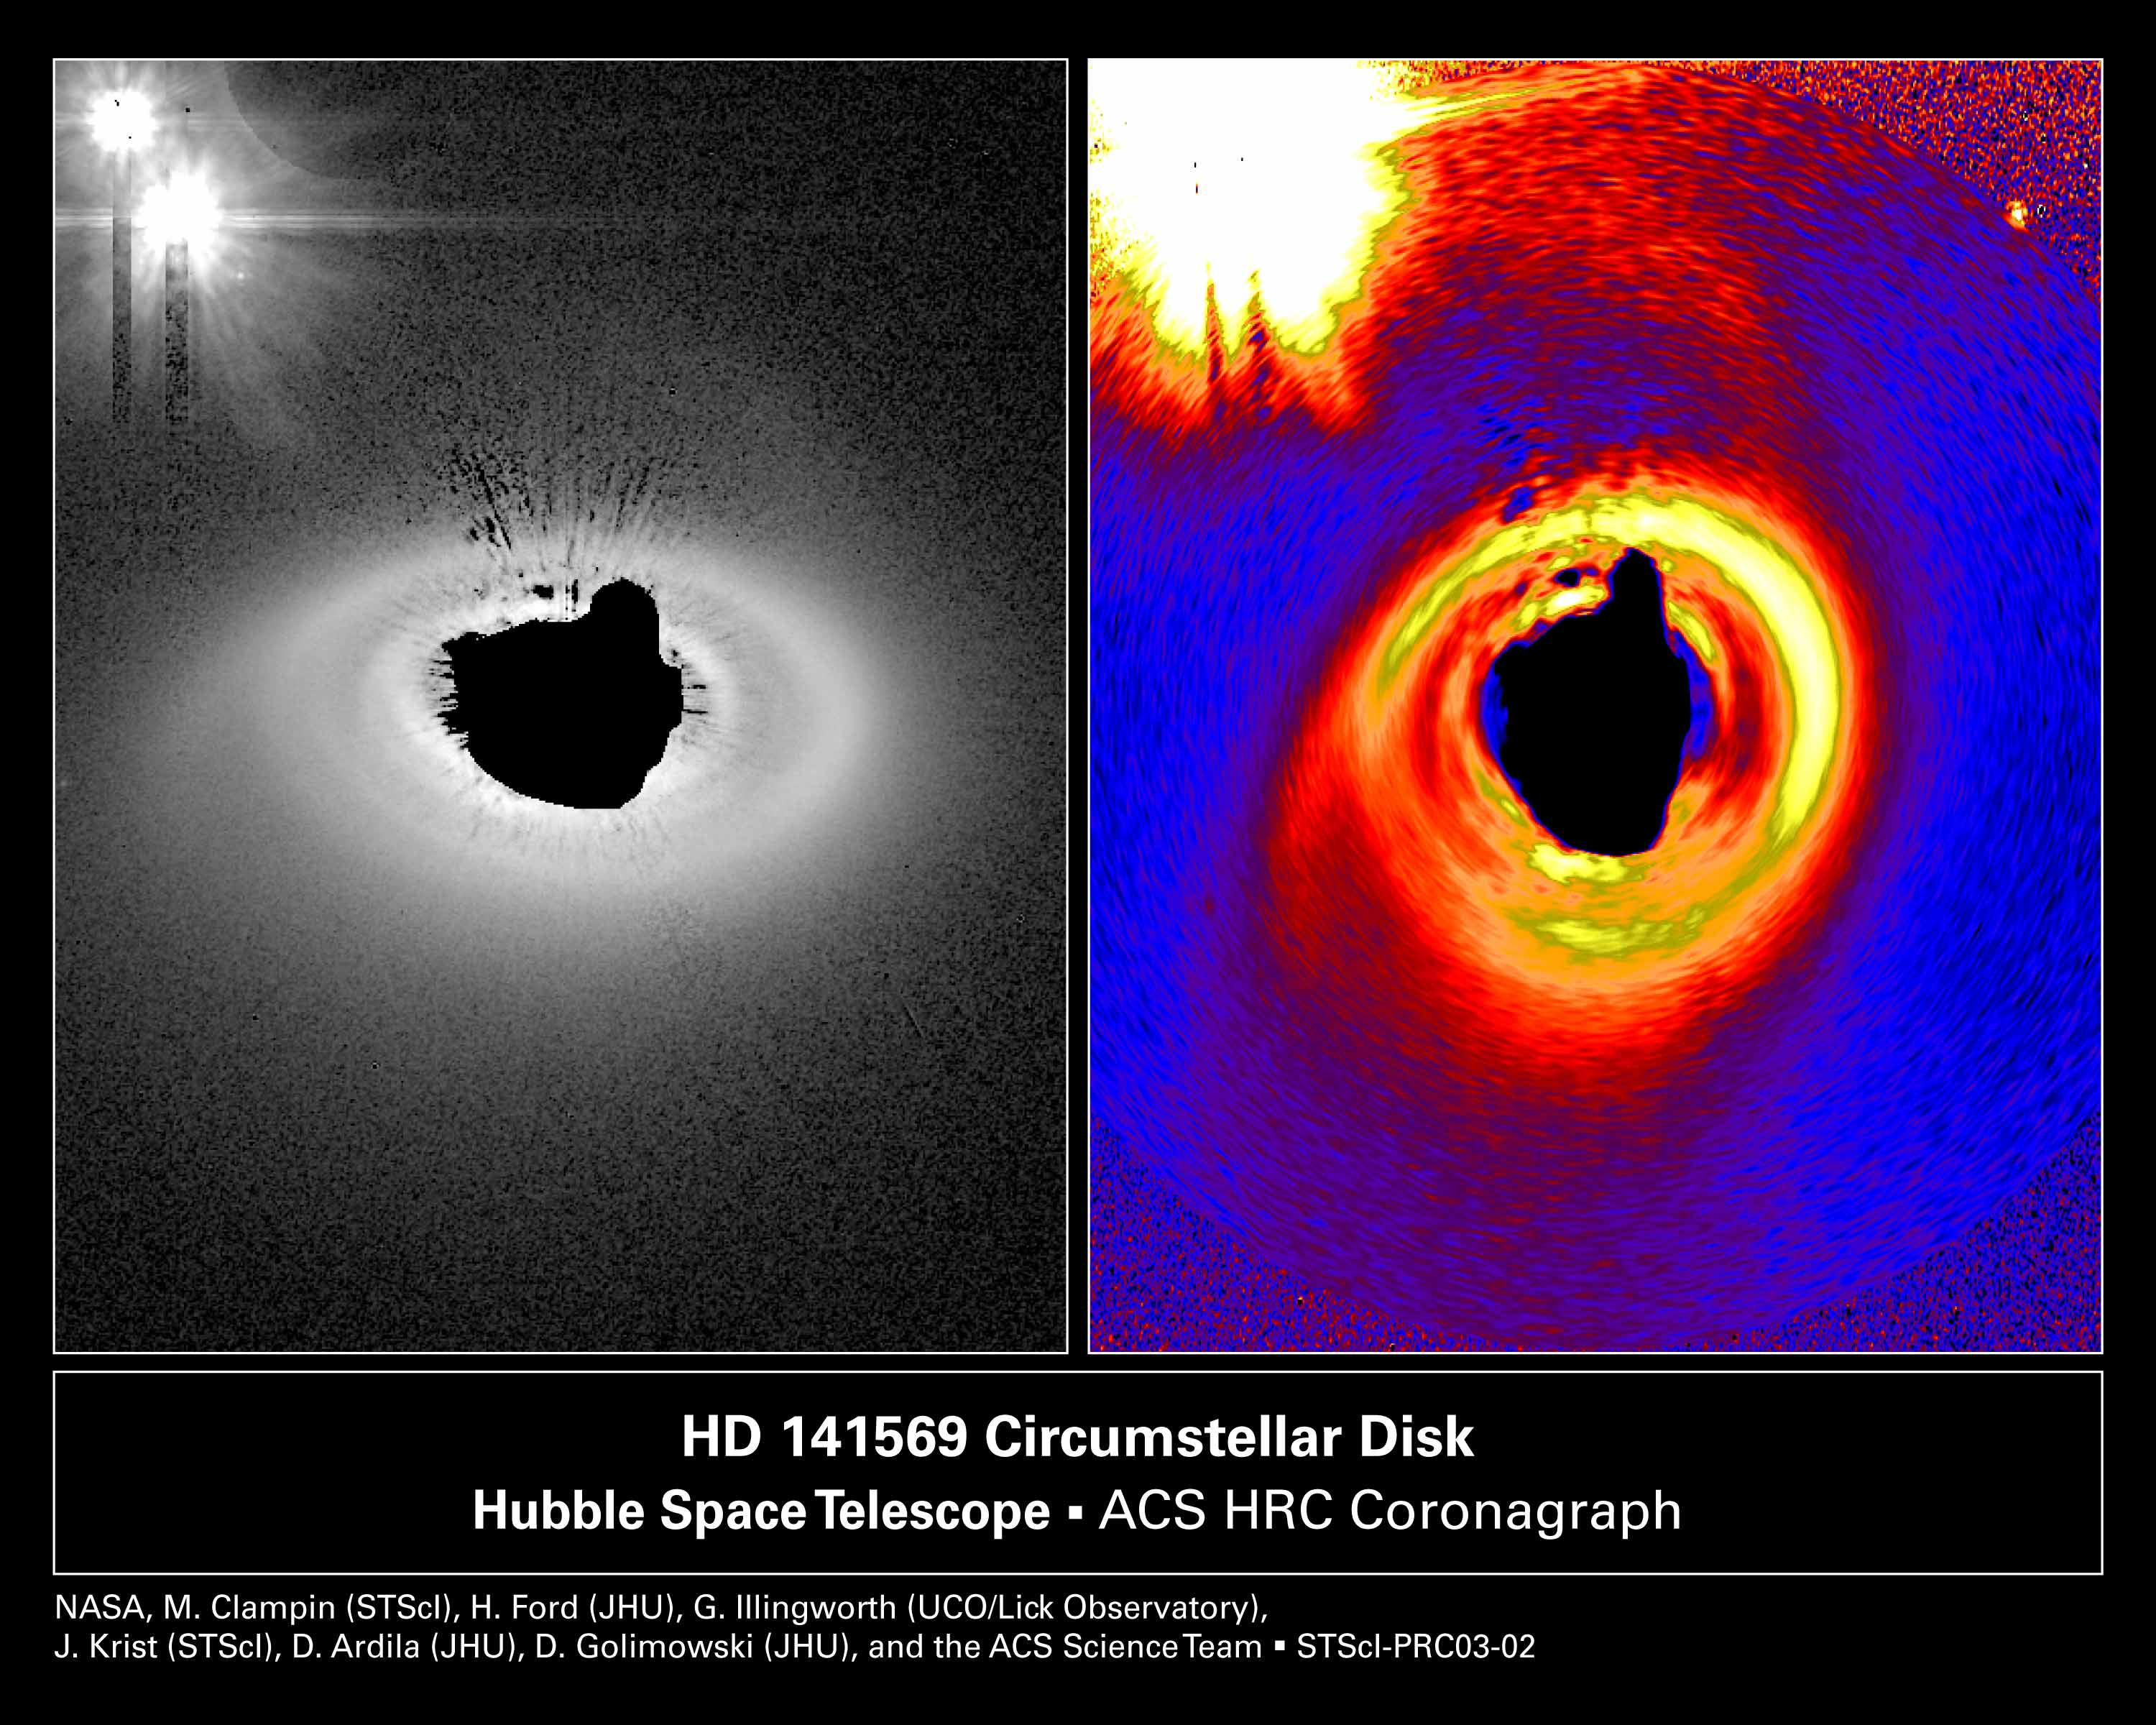

Hubble Reveals Complex Circumstellar Disk

The NASA/ESA Hubble Space Telescope's new Advanced Camera for Surveys (ACS) has given astronomers their clearest view yet of the dust disk around a young, 5-million-year-old star. Such disks are expected to be the birthplace of planets.

The star, called HD 141569A, lies 320 light-years away in the constellation Libra and appears to be a member of a triple-star system. The image at left shows the star and disk as it appears in space. The system is slightly tilted when viewed from Earth. The photo at right portrays the system if astronomers could view it from above.

Credit: NASA, M. Clampin (STScI), H. Ford (JHU), G. Illingworth (UCO/Lick), J. Krist (STScI), D. Ardila (JHU), D. Golimowski (JHU), the ACS Science Team and ESA